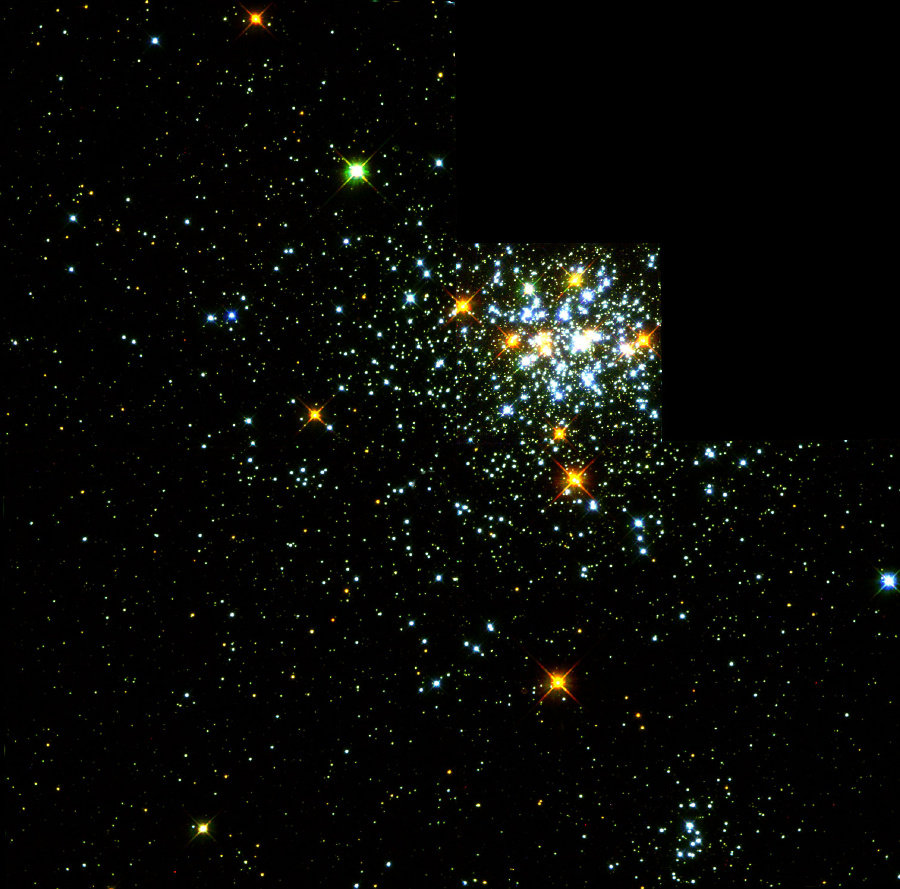

Hot White Dwarf Shines in Young Star Cluster

A dazzling 'jewel-box' collection of over 20, 000 stars can be seen in crystal clarity in this NASA/ESA Hubble Space Telescope image, taken with the Wide Field and Planetary Camera 2. The young (40 million year old) cluster, called NGC 1818, is 164, 000 light-years away in the Large Magellanic Cloud (LMC), a satellite galaxy of our Milky Way. The LMC, a site of vigorous current star formation, is an ideal nearby laboratory for studying stellar evolution.

Credit: Rebecca Elson and Richard Sword, Cambridge UK, and NASA/ESA (Original WFPC2image courtesy J. Westphal, Caltech)